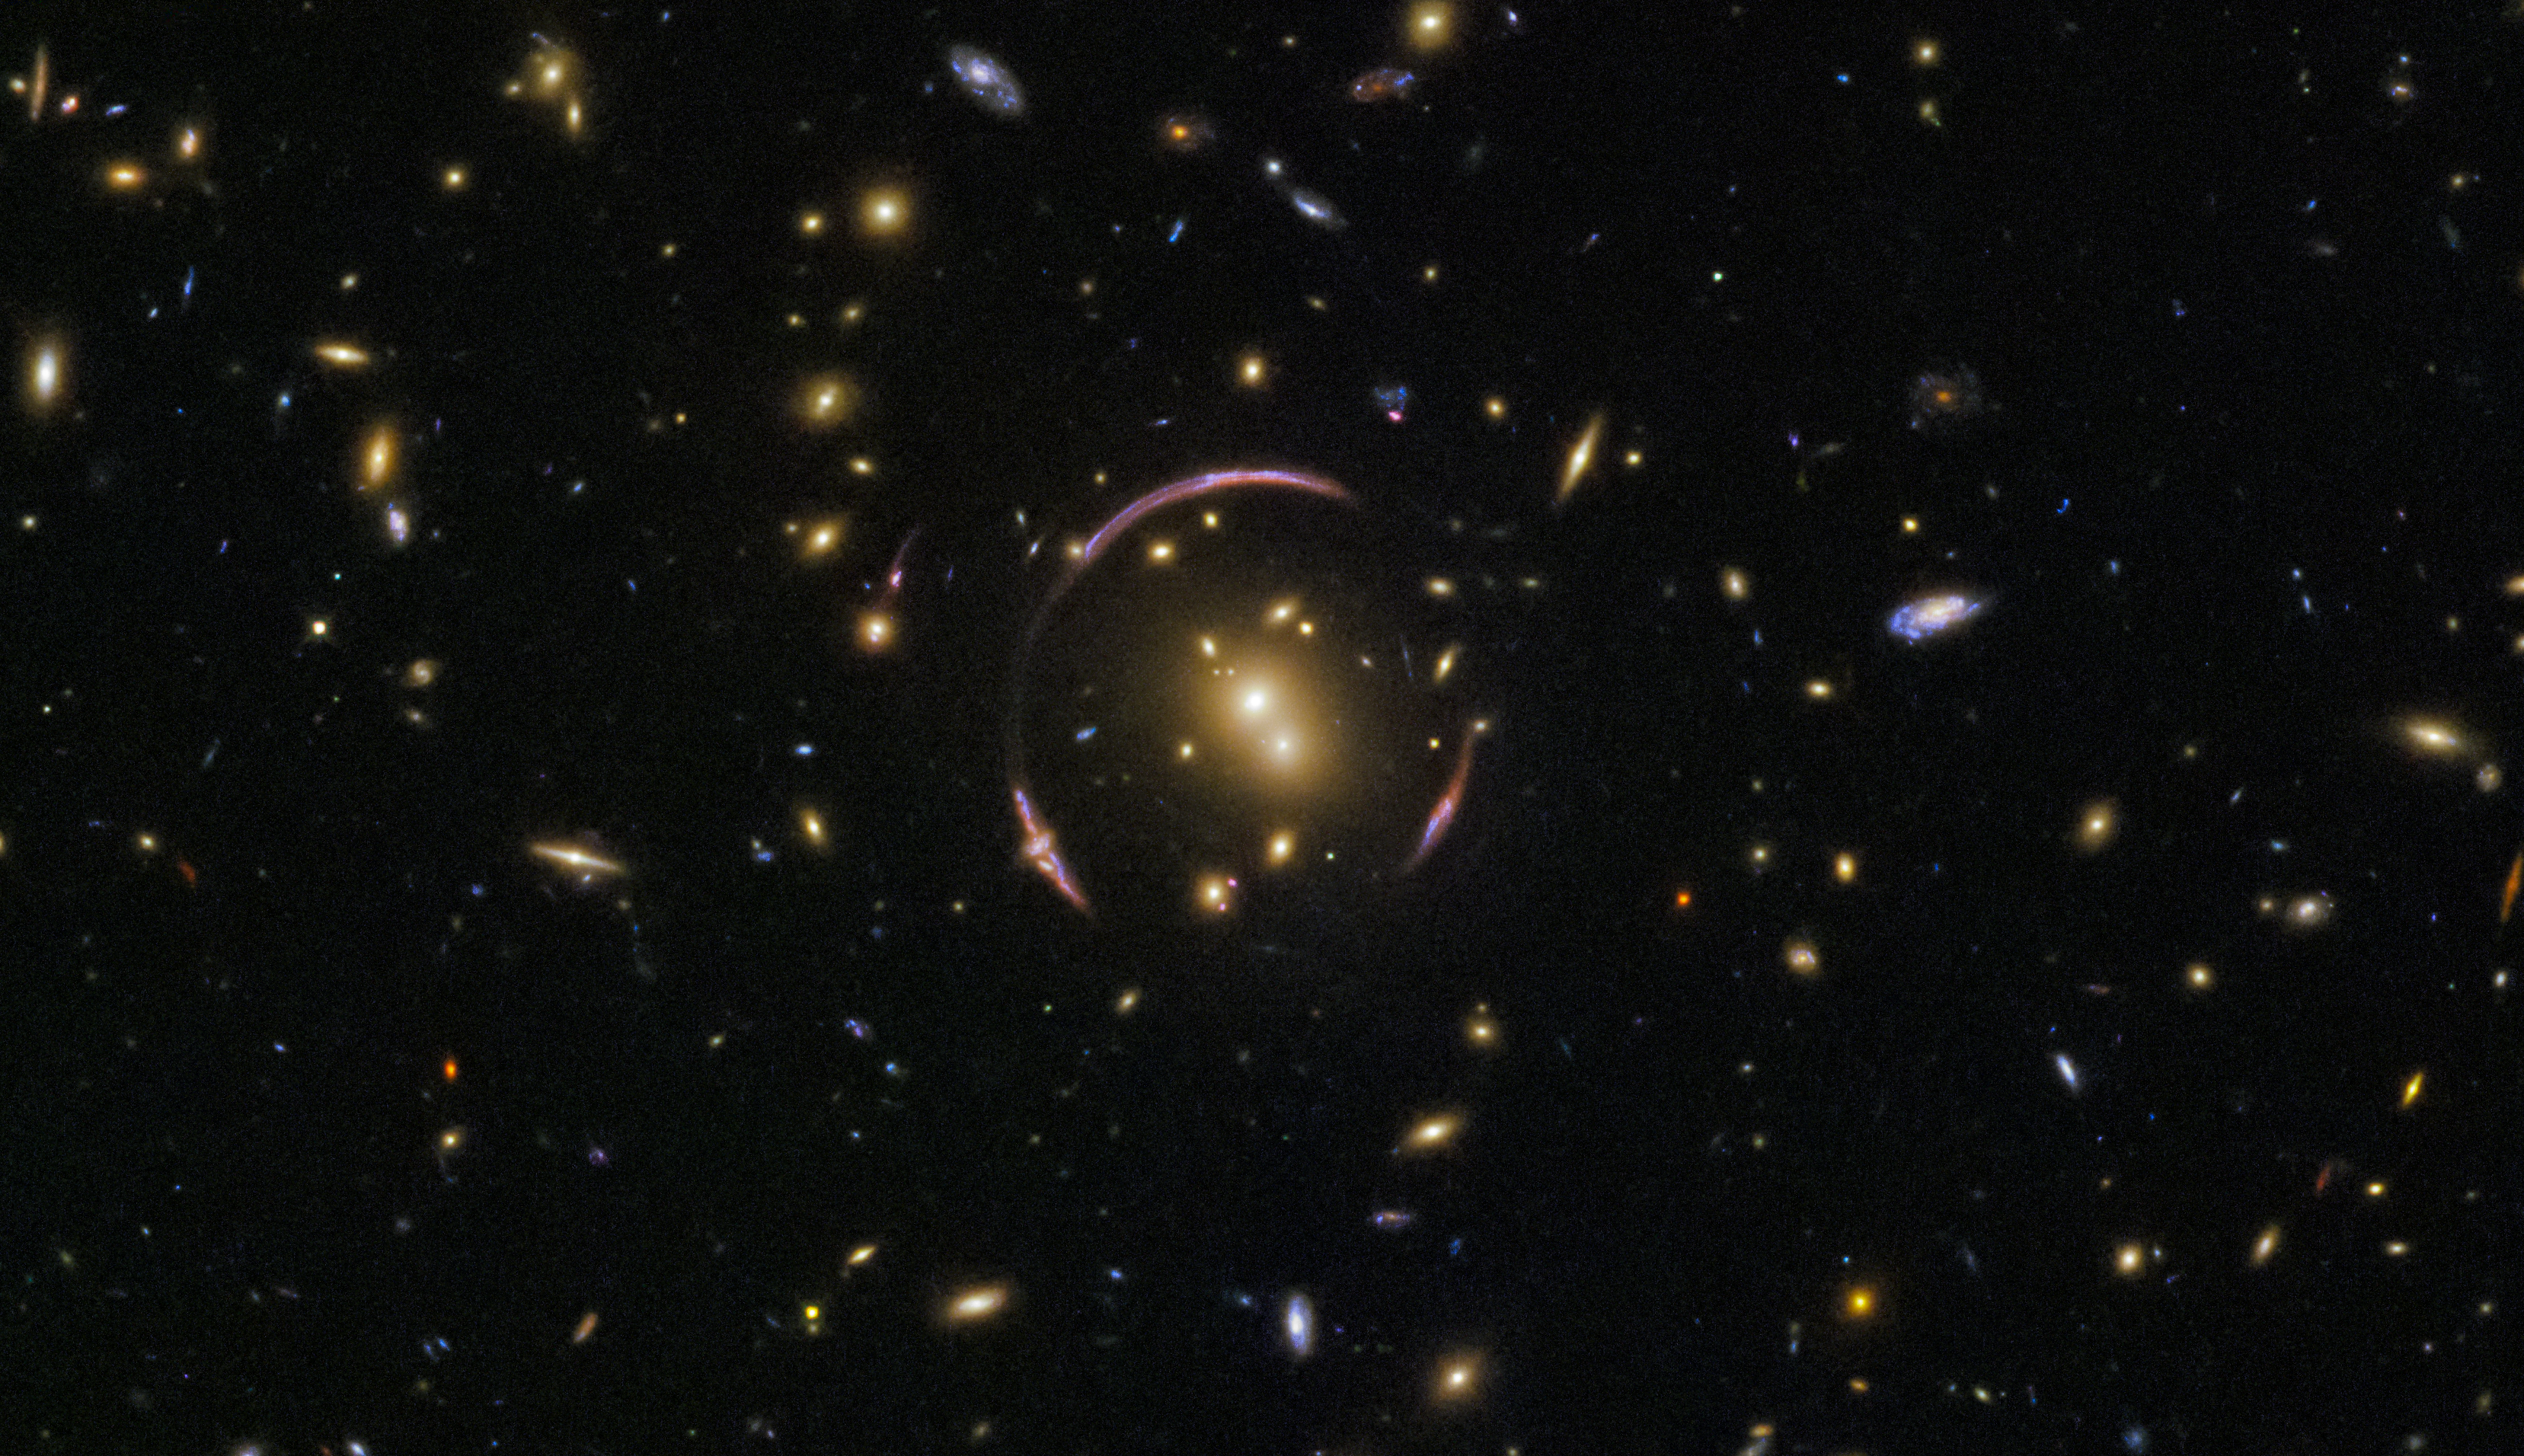

Cosmic cloning

This image is packed full of galaxies! A keen eye can spot exquisite ellipticals and spectacular spirals, seen at various orientations: edge-on with the plane of the galaxy visible, face-on to show off magnificent spiral arms, and everything in between. The vast majority of these specks are galaxies, but to spot a foreground star from our own galaxy, you can look for a point of light with tell-tale diffraction spikes.

The galaxies within the image are almost all part of a galaxy cluster — a monstrous collection of hundreds of galaxies all shackled together in the unyielding grip of gravity — with the charming name of SDSSJ0146-0929. The mass of this galaxy cluster is large enough to severely distort the spacetime, creating the odd, looping curves that almost encircle the central regions of the cluster.

These graceful arcs are examples of a cosmic phenomenon known as an Einstein ring. The ring is created as the light from a distant objects, like galaxies, pass by an extremely large mass, like this galaxy cluster. In this image, the light from a background galaxy is diverted and distorted around the massive intervening cluster and forced to travel along many different light paths towards Earth, making it seem as though the galaxy is in several places at once.

Credit: ESA/Hubble & NASA Acknowledgement: Judy Schmidt